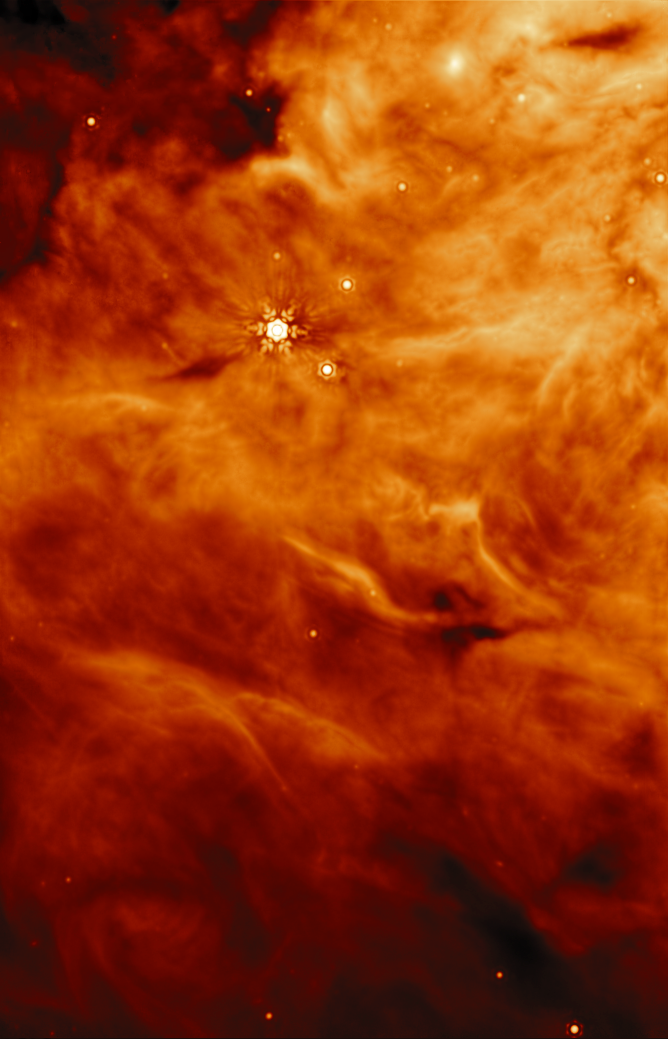

Parallel field to protostar IRAS23385

This image was taken by Webb’s Mid-InfraRed Instrument (MIRI) of a region parallel to the massive protostar known as IRAS23385.

IRAS 2A and IRAS23385 (not visible in this image) were targets for a recent research effort by an international team of astronomers that used Webb to discover that the key ingredients for making potentially habitable worlds are present in early-stage protostars, where planets have not yet formed.

With MIRI’s unprecedented spectral resolution and sensitivity, the JOYS+ (James Webb Observations of Young ProtoStars) programme individually identified organic molecules that have been confirmed to be present in interstellar ices. This includes the robust detection of acetaldehyde, ethanol, methyl formate, and likely acetic acid, in the solid phase.

Credit: ESA/Webb, NASA, CSA, W. Rocha et al. (Leiden University)